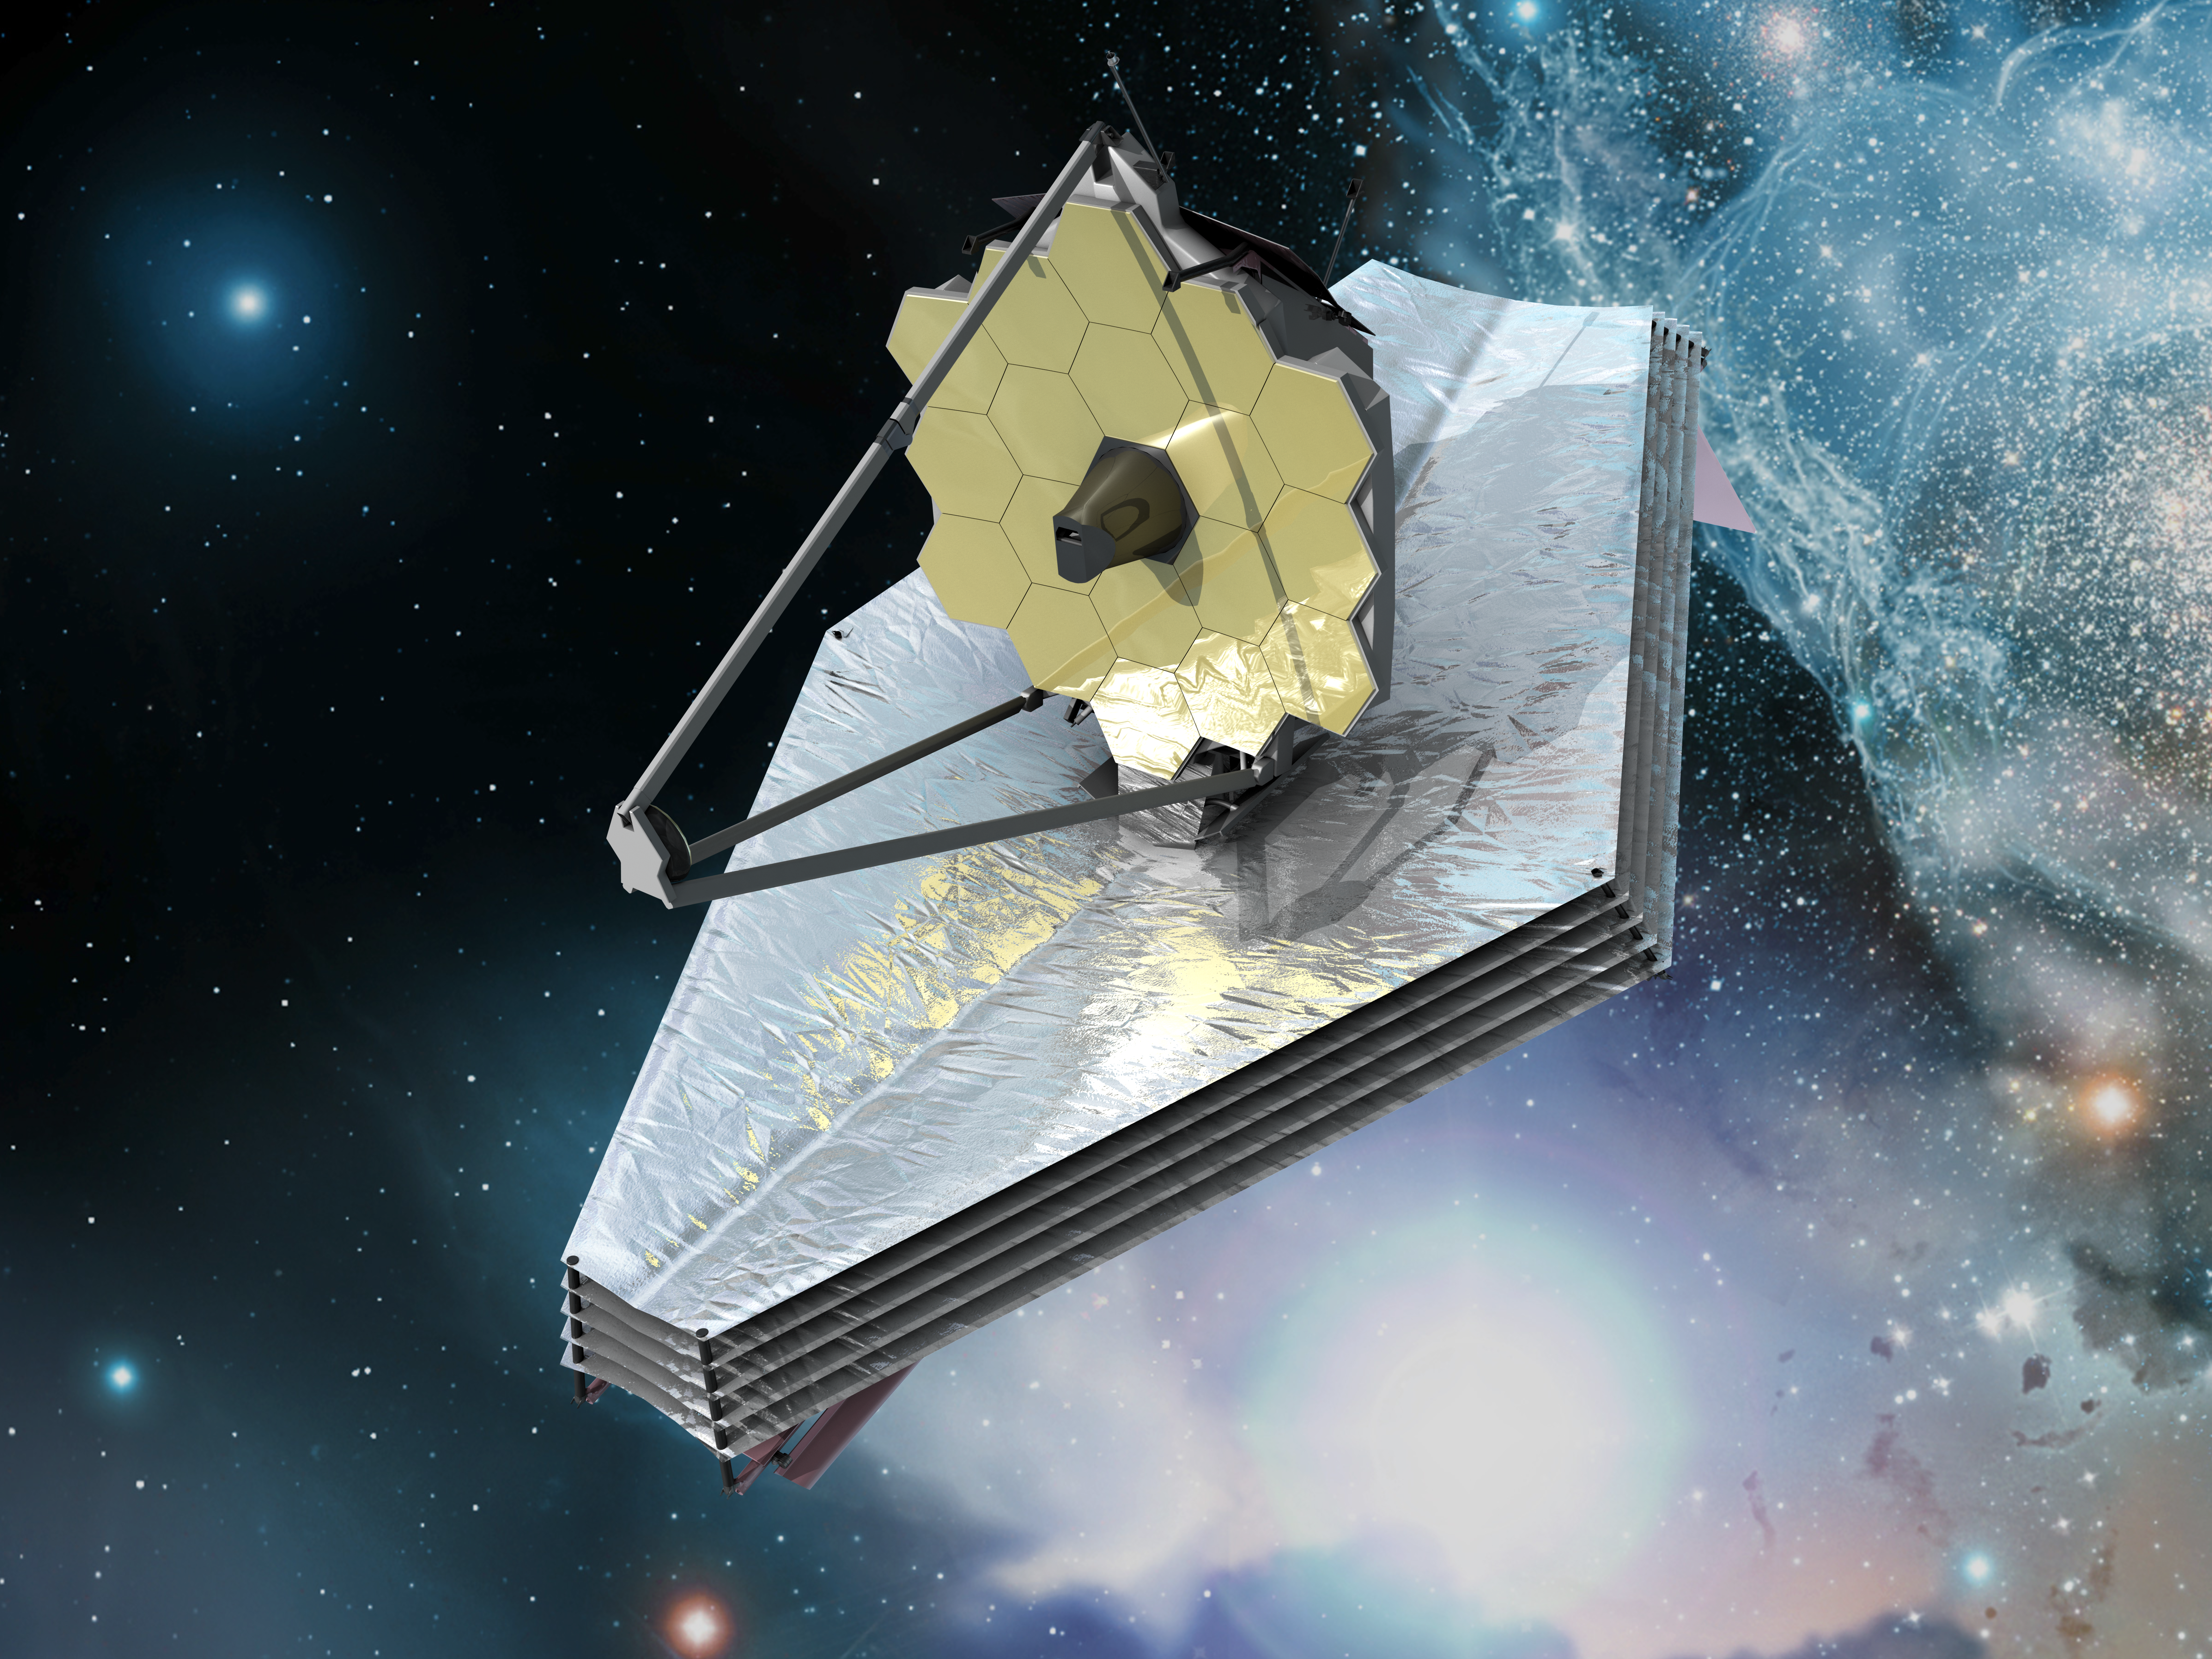

James Webb Space Telescope (artist's impression)

The James Webb Space Telescope

Credit: ESA (C. Carreau)